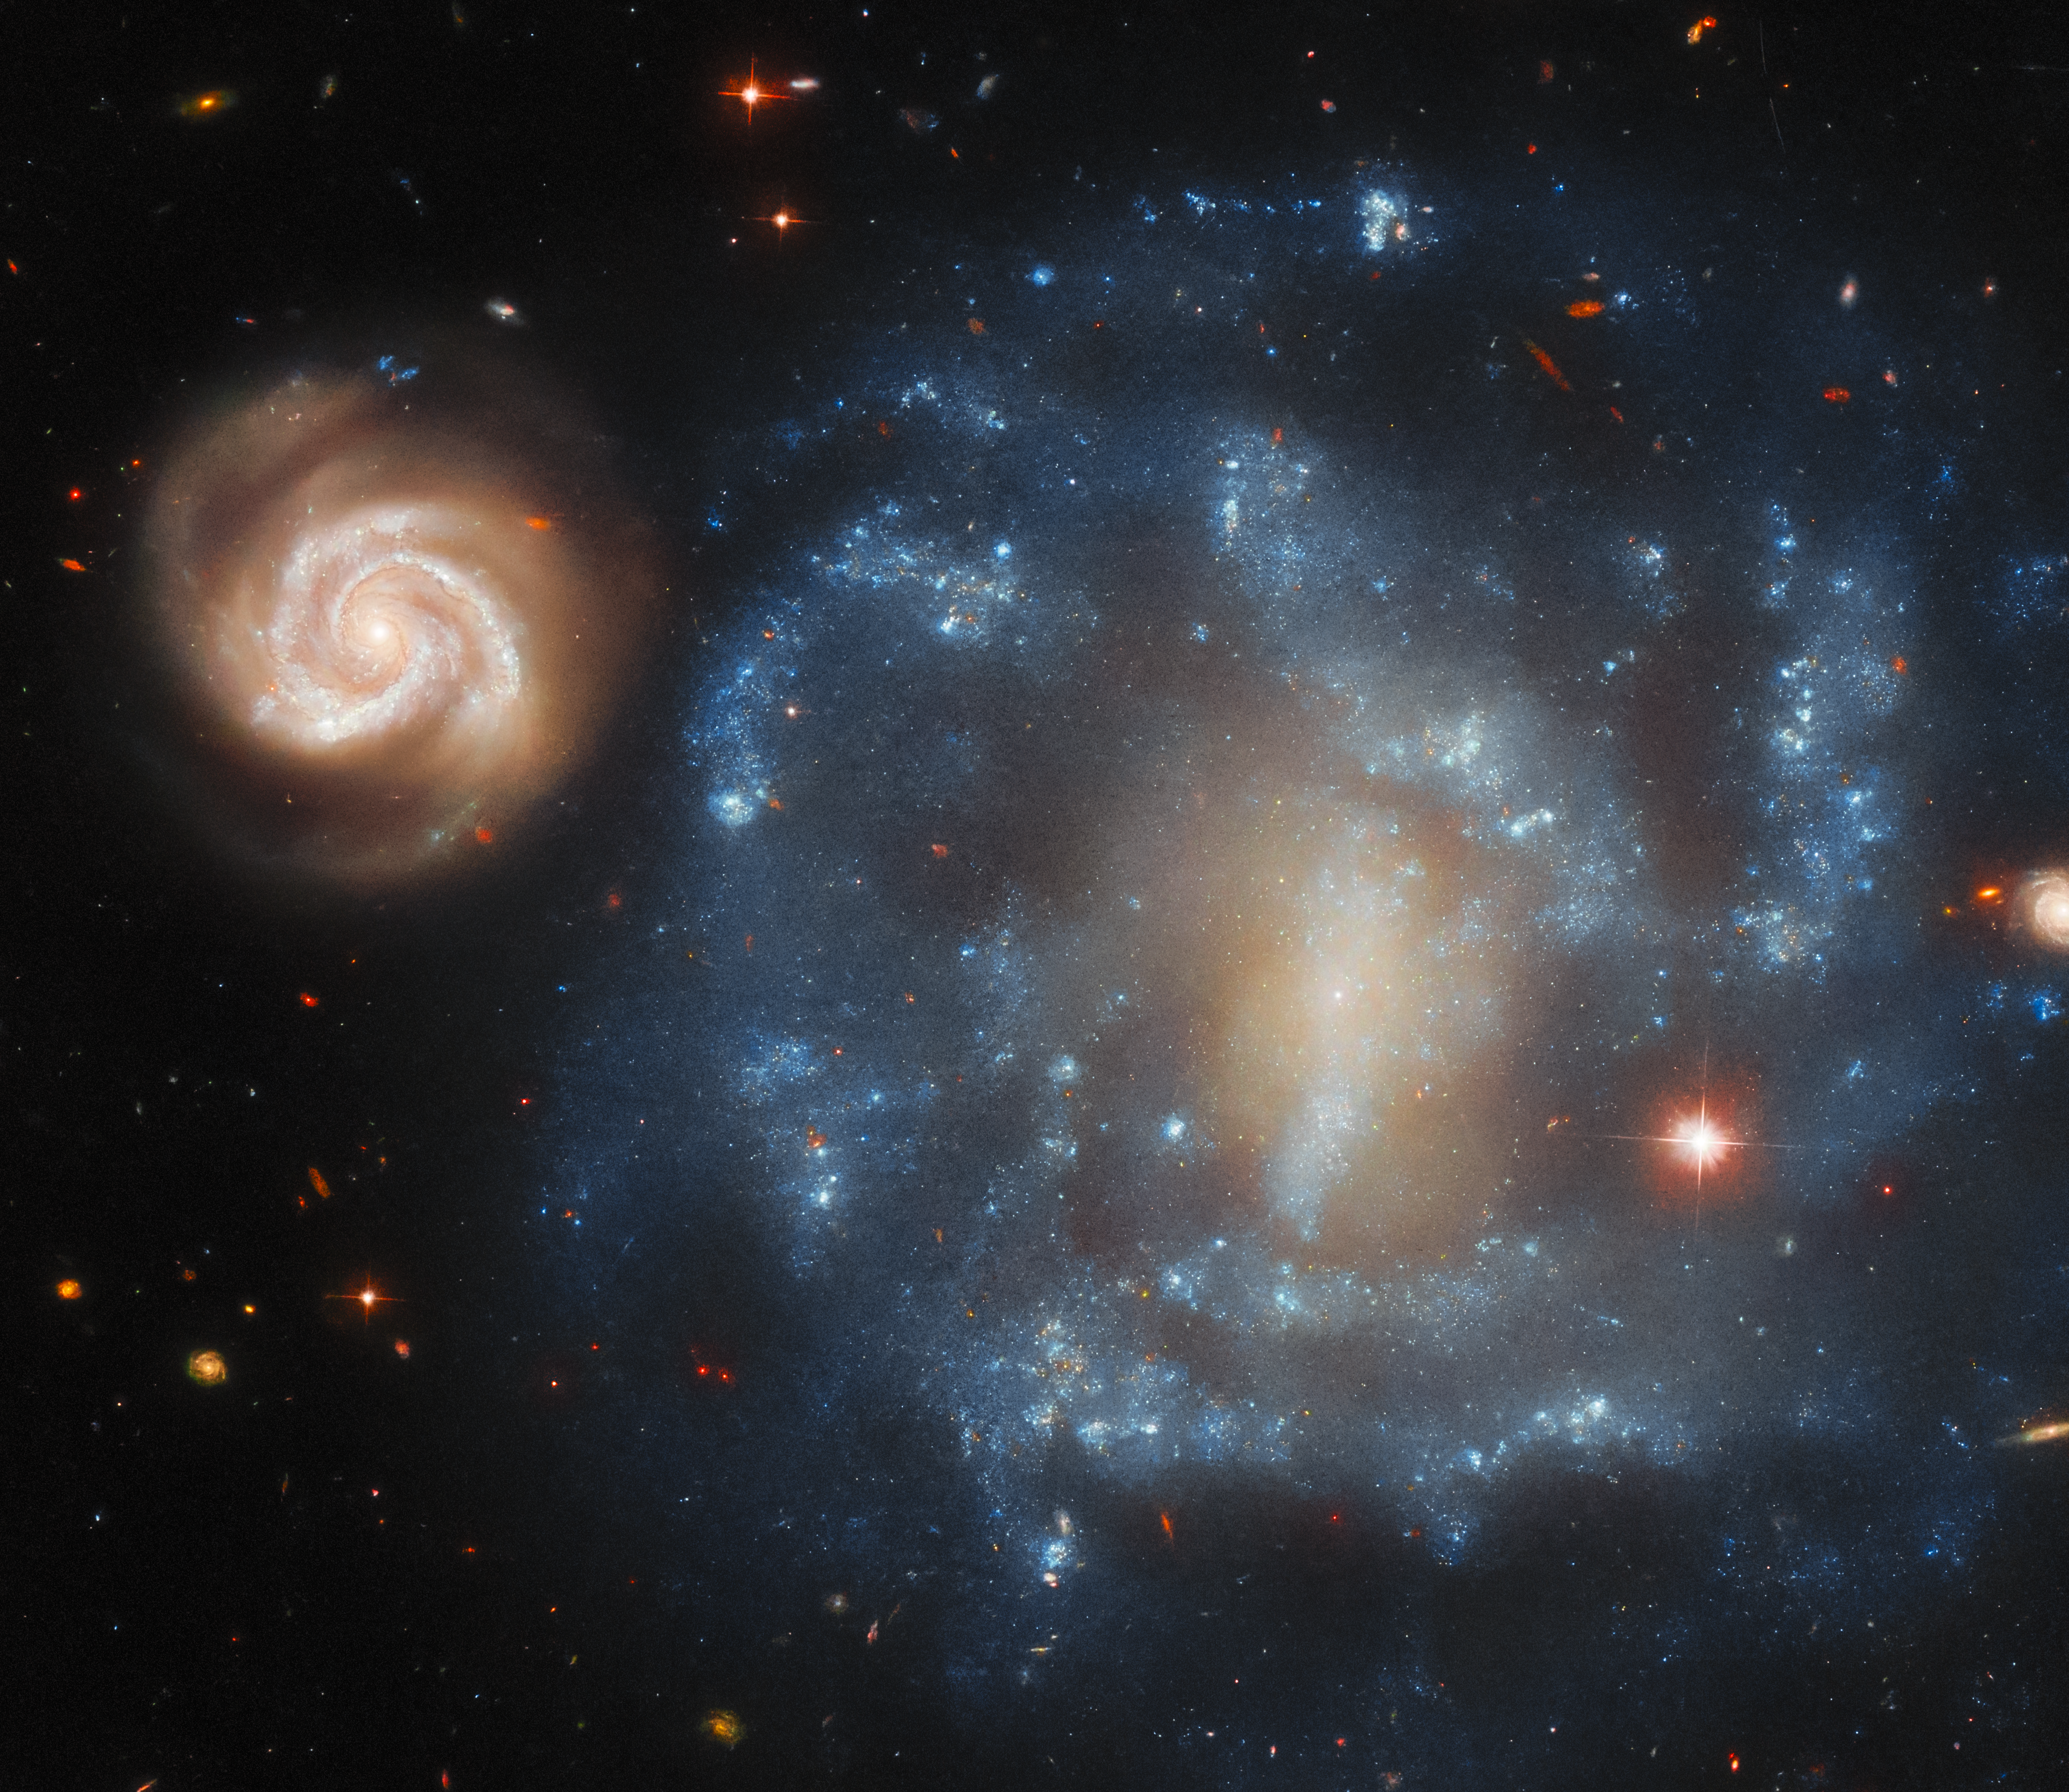

Long-distance relationship

These galaxies look to be close companions — a small, bright spiral galaxy flitting around the edge of a much larger spiral with a dark and disturbed countenance. But looks can be deceiving — how close are they really? The celestial pair featured in this week’s Hubble Picture of the Week is known by the name Arp 4, and lies in the constellation Cetus (the Whale).

The designation Arp 4 comes from the Atlas of Peculiar Galaxies, compiled in the 1960s by astronomer Halton Arp. “Unusual galaxies” were selected and photographed to provide examples of weird and non-standard shapes, the better to study how galaxies evolve into these forms. Throughout its mission the Hubble Space Telescope has revolutionised the study of galaxies and shown us some fantastically unusual examples from Arp’s atlas. In that catalogue, the first few galaxies like Arp 4 are “low surface brightness” galaxies, a type of galaxy that is unexpectedly faint and hard to detect. The large galaxy here — also catalogued as MCG-02-05-050 — fits this description well, with its fragmentary arms and dim disc. Its smaller companion, MCG-02-05-050a, is a much more bright and active spiral.

The trick is that these galaxies are not actually very close. The large blue galaxy MCG-02-05-050 is located 65 million light-years from Earth; its brighter smaller companion MCG-02-05-050a, at 675 million light-years away, is over ten times the distance! Owing to this, MCG-02-05-050a is likely the larger galaxy of the two, and MCG-02-05-050 comparatively small. Their pairing in this image is simply an unlikely visual coincidence. Despite this lack of a physical relation between them, our point of view on Earth allows us to enjoy the sight of Arp 4 as an odd couple in the sky.

Credit: ESA/Hubble & NASA, J. Dalcanton, Dark Energy Survey/DOE/FNAL/DECam/CTIO/NOIRLab/NSF/AURA